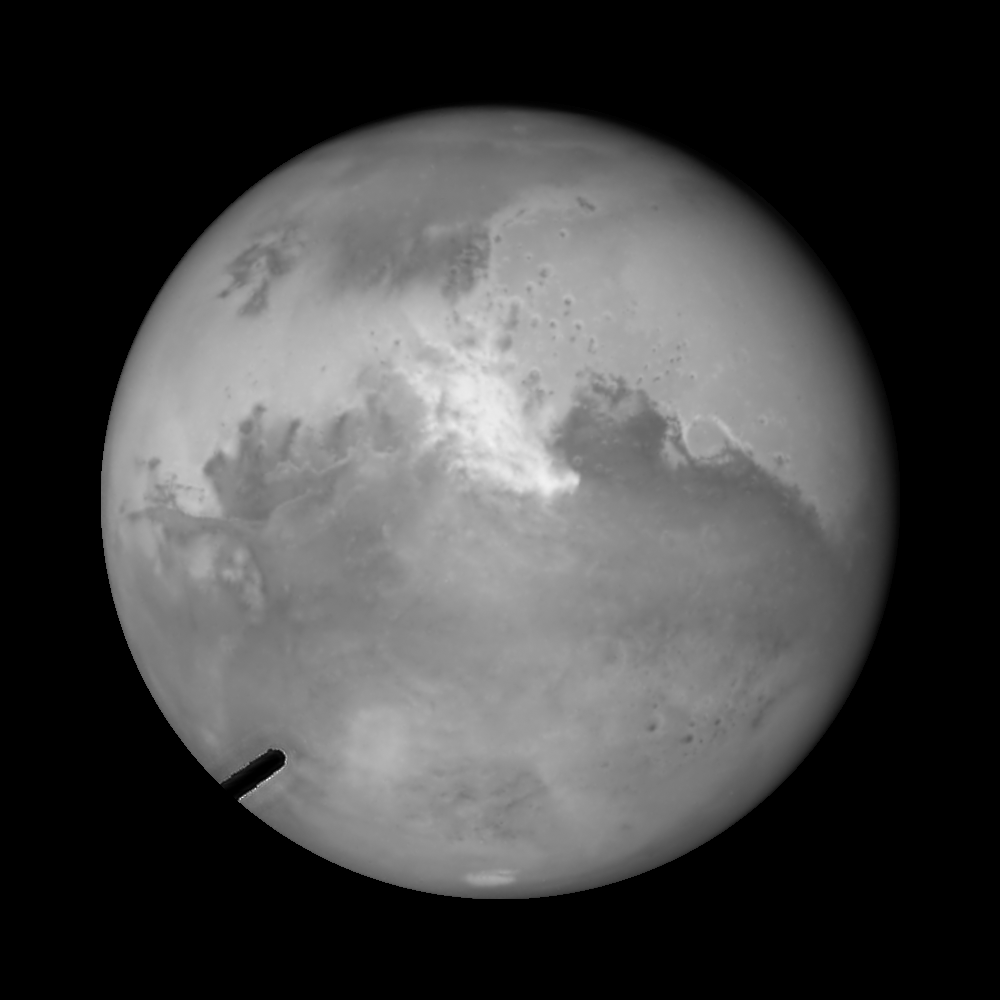

Hubble's high resolution camera - "Mind the Gap"

The Advanced Camera for Surveys on Hubble Space Telescope includes two cameras, the Wide Field Channel (WFC) and the High Resolution Channel (HRC). Images from the WFC are roughly 4,000 pixels square with a scale of roughly 0.05 arcseconds per pixel. Images from the HRC are smaller in pixel size, 1,000 pixels square, but have a finer resolution, 0.025 arcseconds per pixel. The HRC is preferred for images of planets, or objects appearing smaller on the sky, where higher resolution outweighs larger field of view. The HRC also has two occulting masks that can block starlight from bright sources, and allow fainter objects nearby that are otherwise lost in the glare of the brighter object to be visible. One of the masks can be removed, but the other mask, seen in this Mars image at the lower left corner, can not be moved out of the light path. This "occulting finger" blocked a small portion of the light from Mars. The small amount of missing data in the final colour composite of Mars was corrected by filling with nearby sections of the image of similar colour and texture. This is a method commonly used in digital photography to remove blemishes, but is not used with data published in scientific papers.

Credit: NASA, ESA, and Z. Levay (STScI)